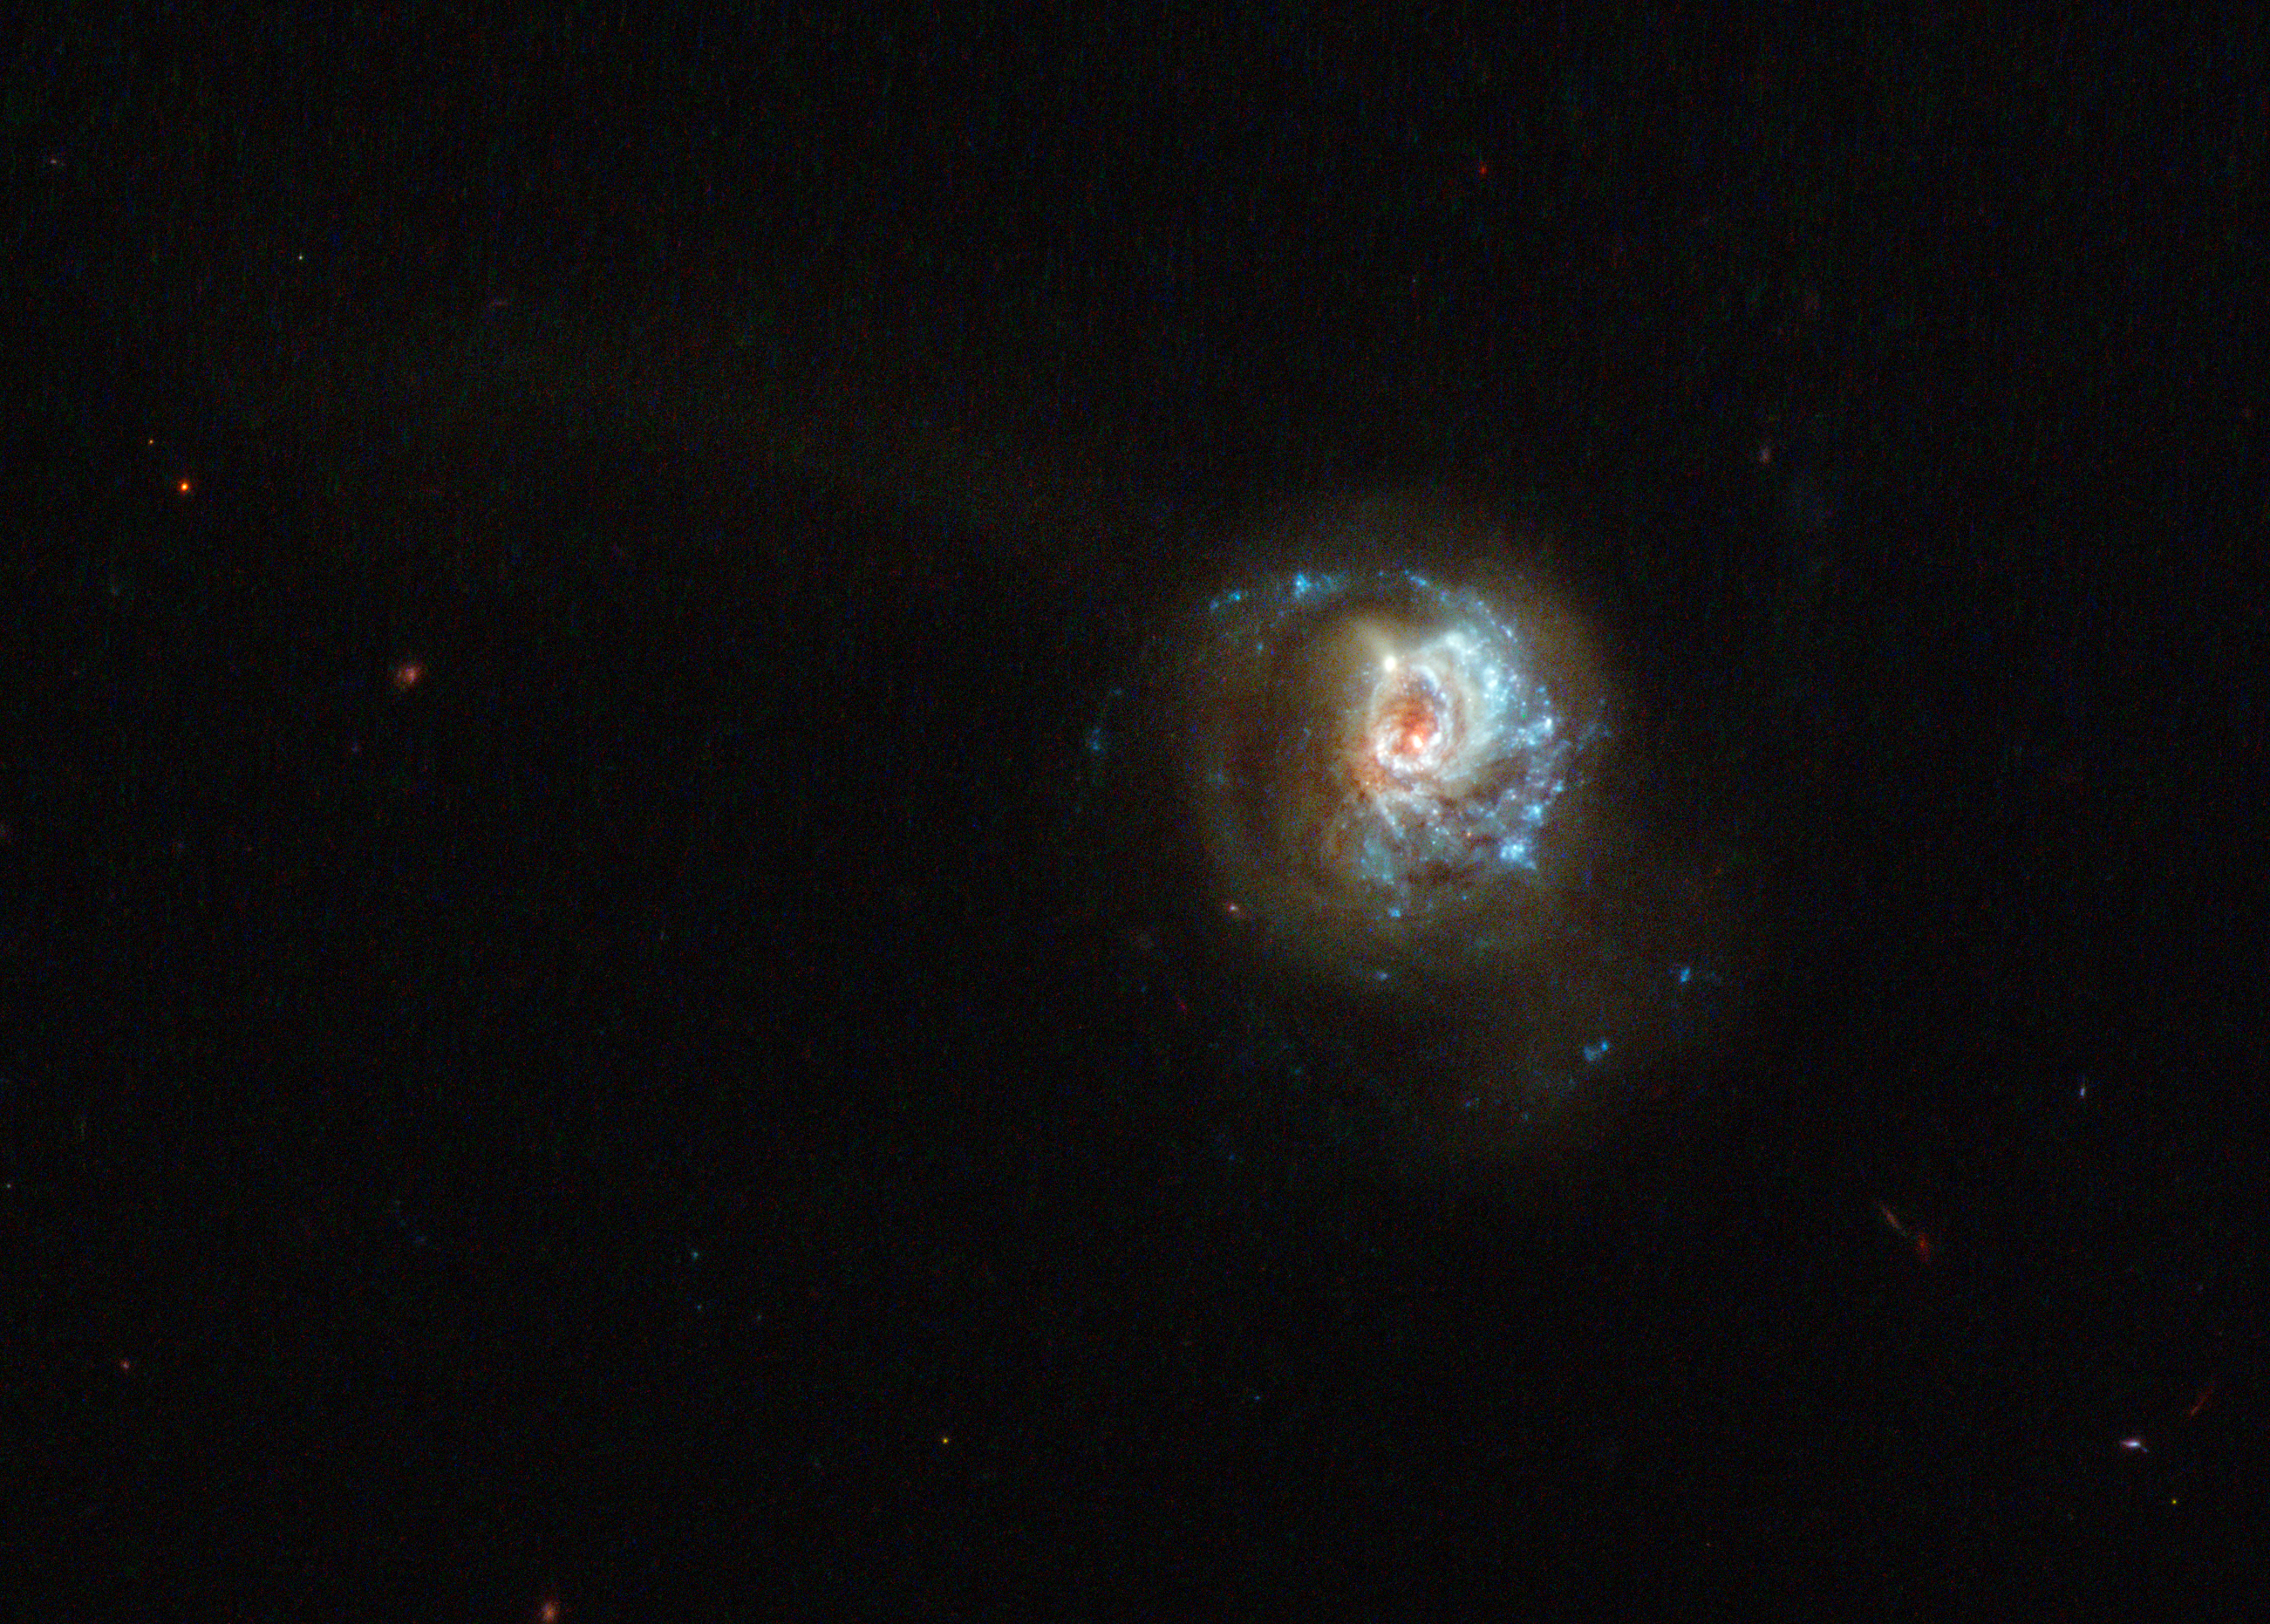

A swirl of star formation

This beautiful, glittering swirl is named, rather unpoetically, J125013.50+073441.5. A glowing haze of material seems to engulf the galaxy, stretching out into space in different directions and forming a fuzzy streak in this image. It is a starburst galaxy — a name given to galaxies that show unusually high rates of star formation. The regions where new stars are being born are highlighted by sparkling bright blue regions along the galactic arms.

Studying starburst galaxies can tell us a lot about galactic evolution and star formation. These galaxies start off with huge amounts of gas, which is used to form new stars. This period of furious star formation is only a phase; once all the gas is used up, this starbirth slows down. Other famous starbursts captured by Hubble include the Antennae Galaxies and Messier 82, the latter of which is forming new stars ten times faster than our galaxy, the Milky Way.

The data for this image were collected as part of a study named LARS (Lyman Alpha Reference Sample) [1], which is investigating the interaction between radiation and matter in relatively nearby starburst galaxies. J125013.50+073441.5 is included as one of its fourteen targets. This study has characterised how a certain type of emission known as Lyman-alpha emission interacts with nearby gas, affecting how it travels out into space.

The data for this image were collected using Hubble’s Wide Field Camera 3.

Credit: ESA/Hubble & NASA, M. Hayes